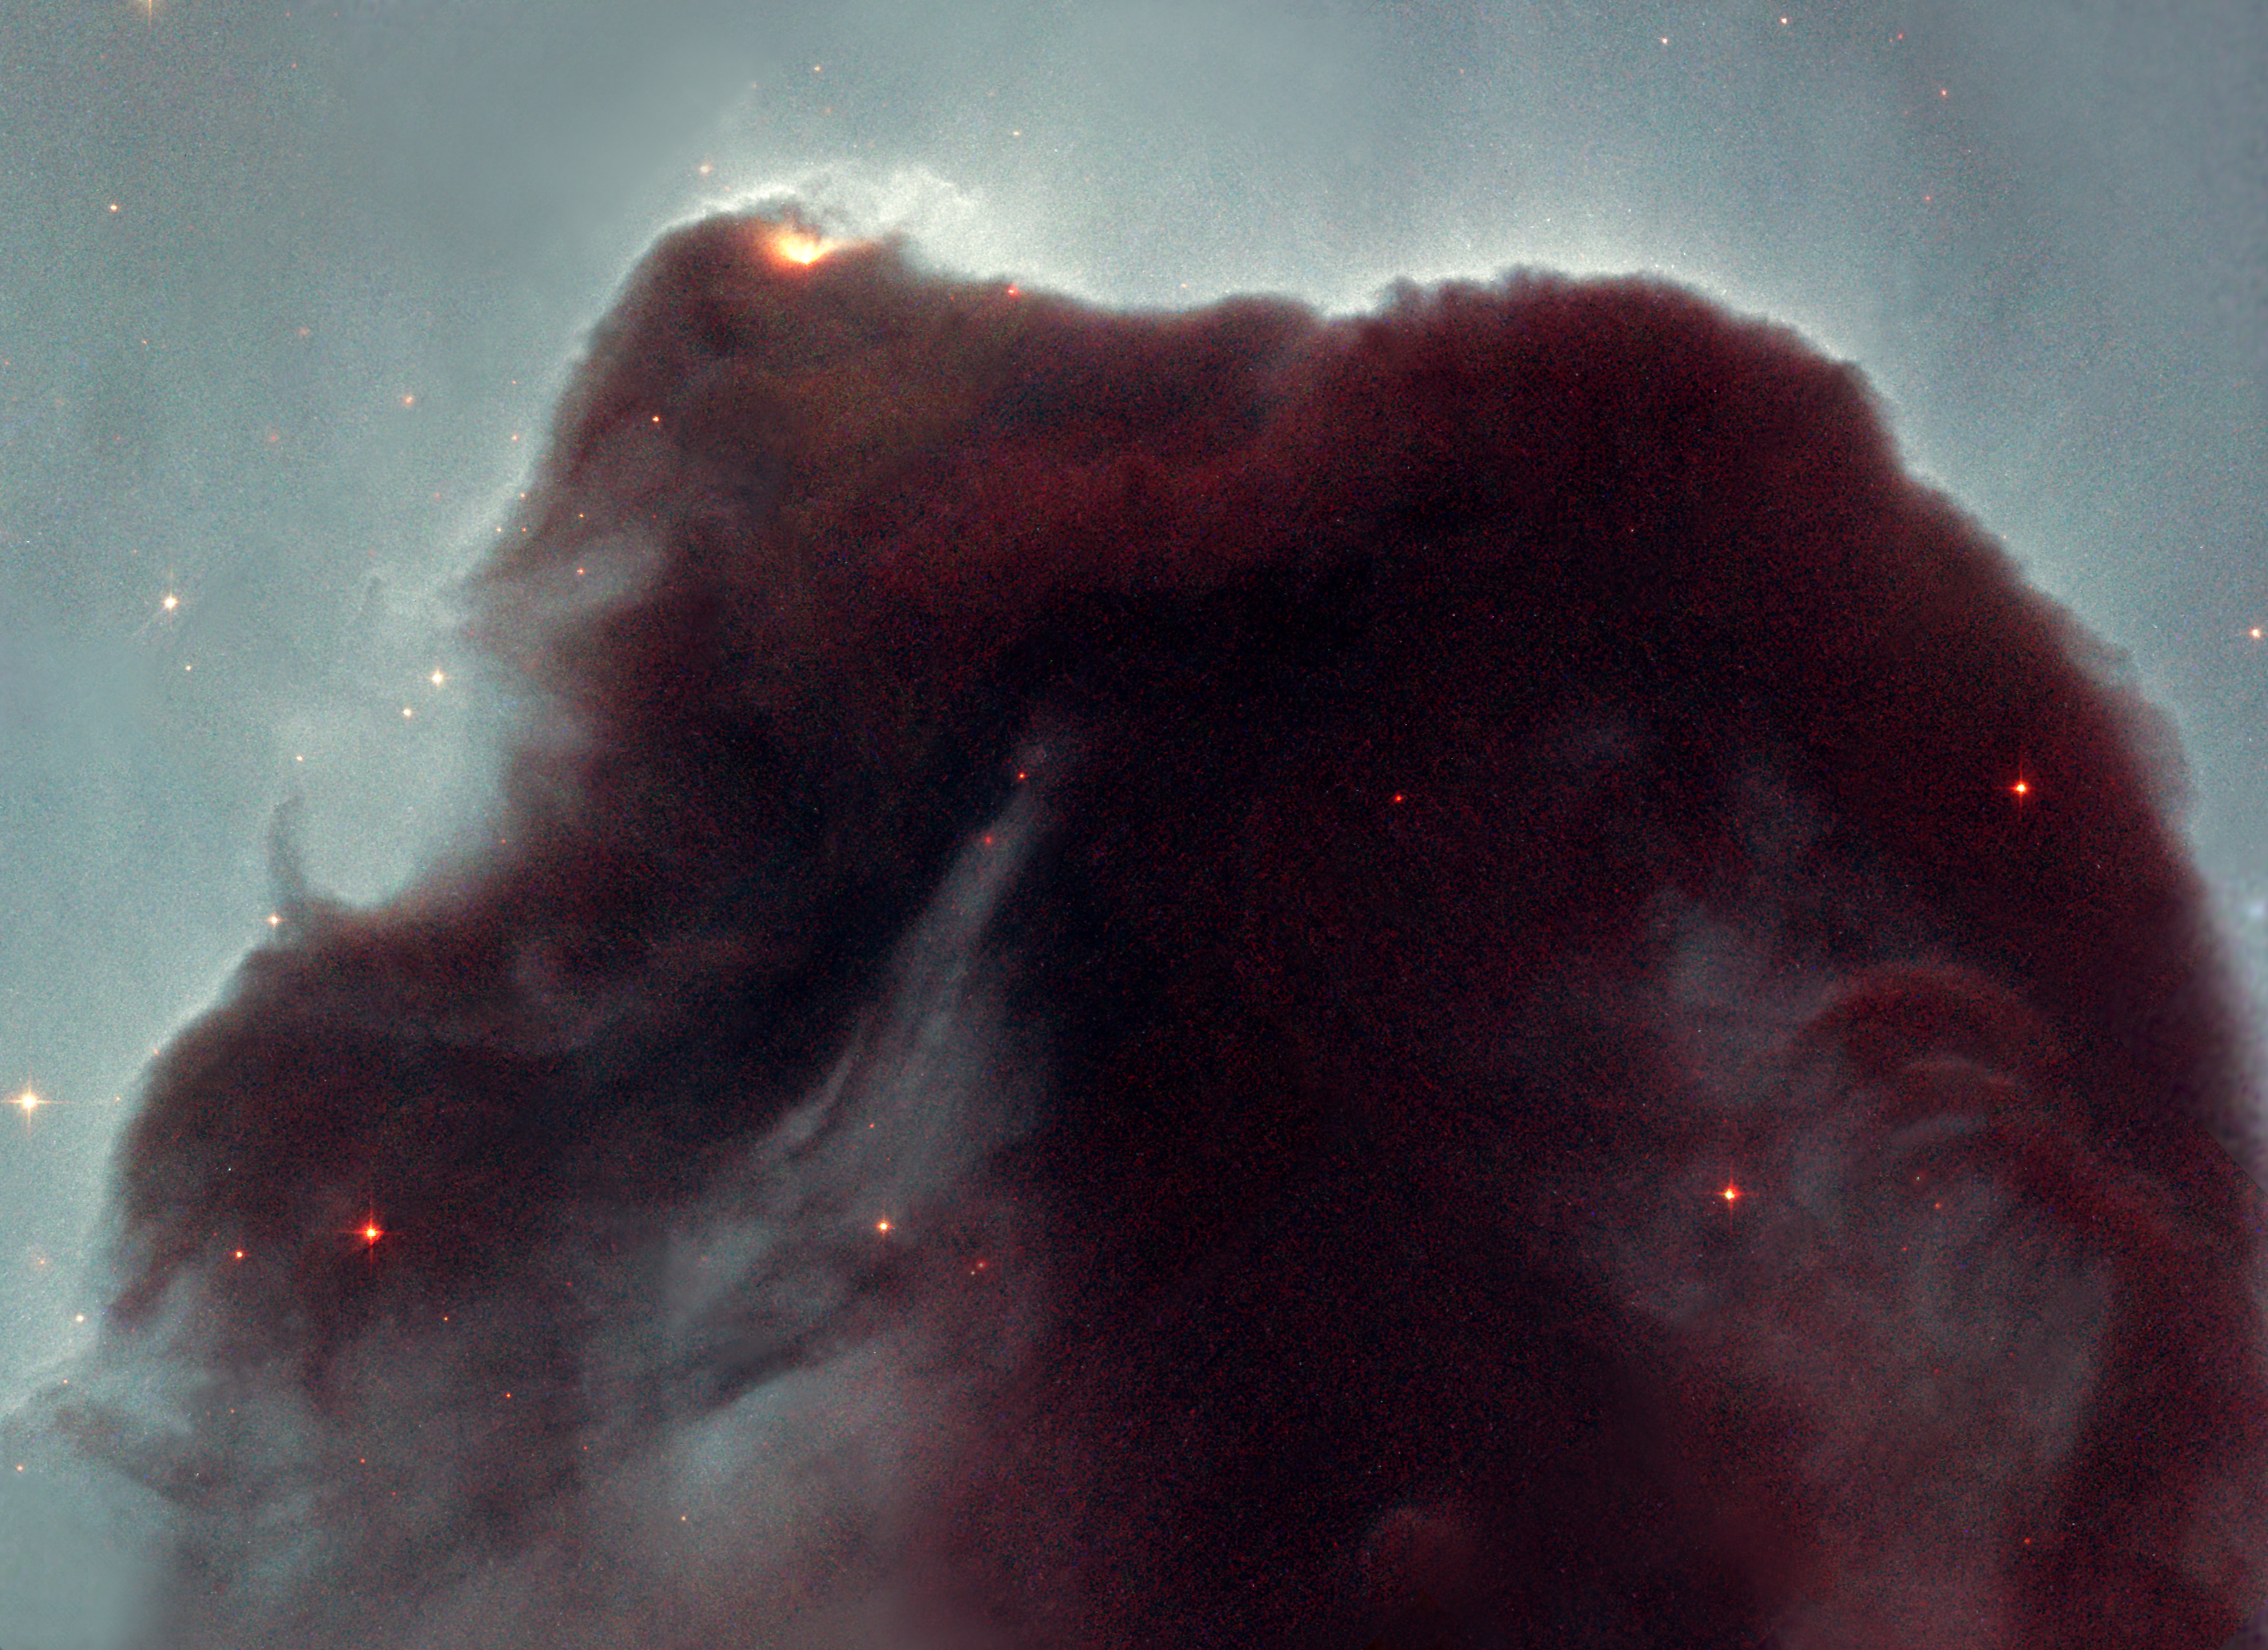

Eleven years in orbit: Hubble observes the popular Horsehead nebula

Rising from a sea of dust and gas like a giant seahorse, the Horsehead nebula is one of the most photographed objects in the sky. NASA/ESA Hubble Space Telescope took a close-up look at this heavenly icon, revealing the cloud's intricate structure. This detailed view of the horse's head is being released to celebrate the orbiting observatory's eleventh anniversary. Produced by the Hubble Heritage Project, this picture is a testament to the Horsehead's popularity. Internet voters selected this object for the orbiting telescope to view.

The Horsehead, also known as Barnard 33, is a cold, dark cloud of gas and dust, silhouetted against the bright nebula, IC 434. The bright area at the top left edge is a young star still embedded in its nursery of gas and dust. But radiation from this hot star is eroding the stellar nursery. The top of the nebula also is being sculpted by radiation from a massive star located out of Hubble's field of view.

Credit: NASA, NOAO, ESA and The Hubble Heritage Team (STScI/AURA)